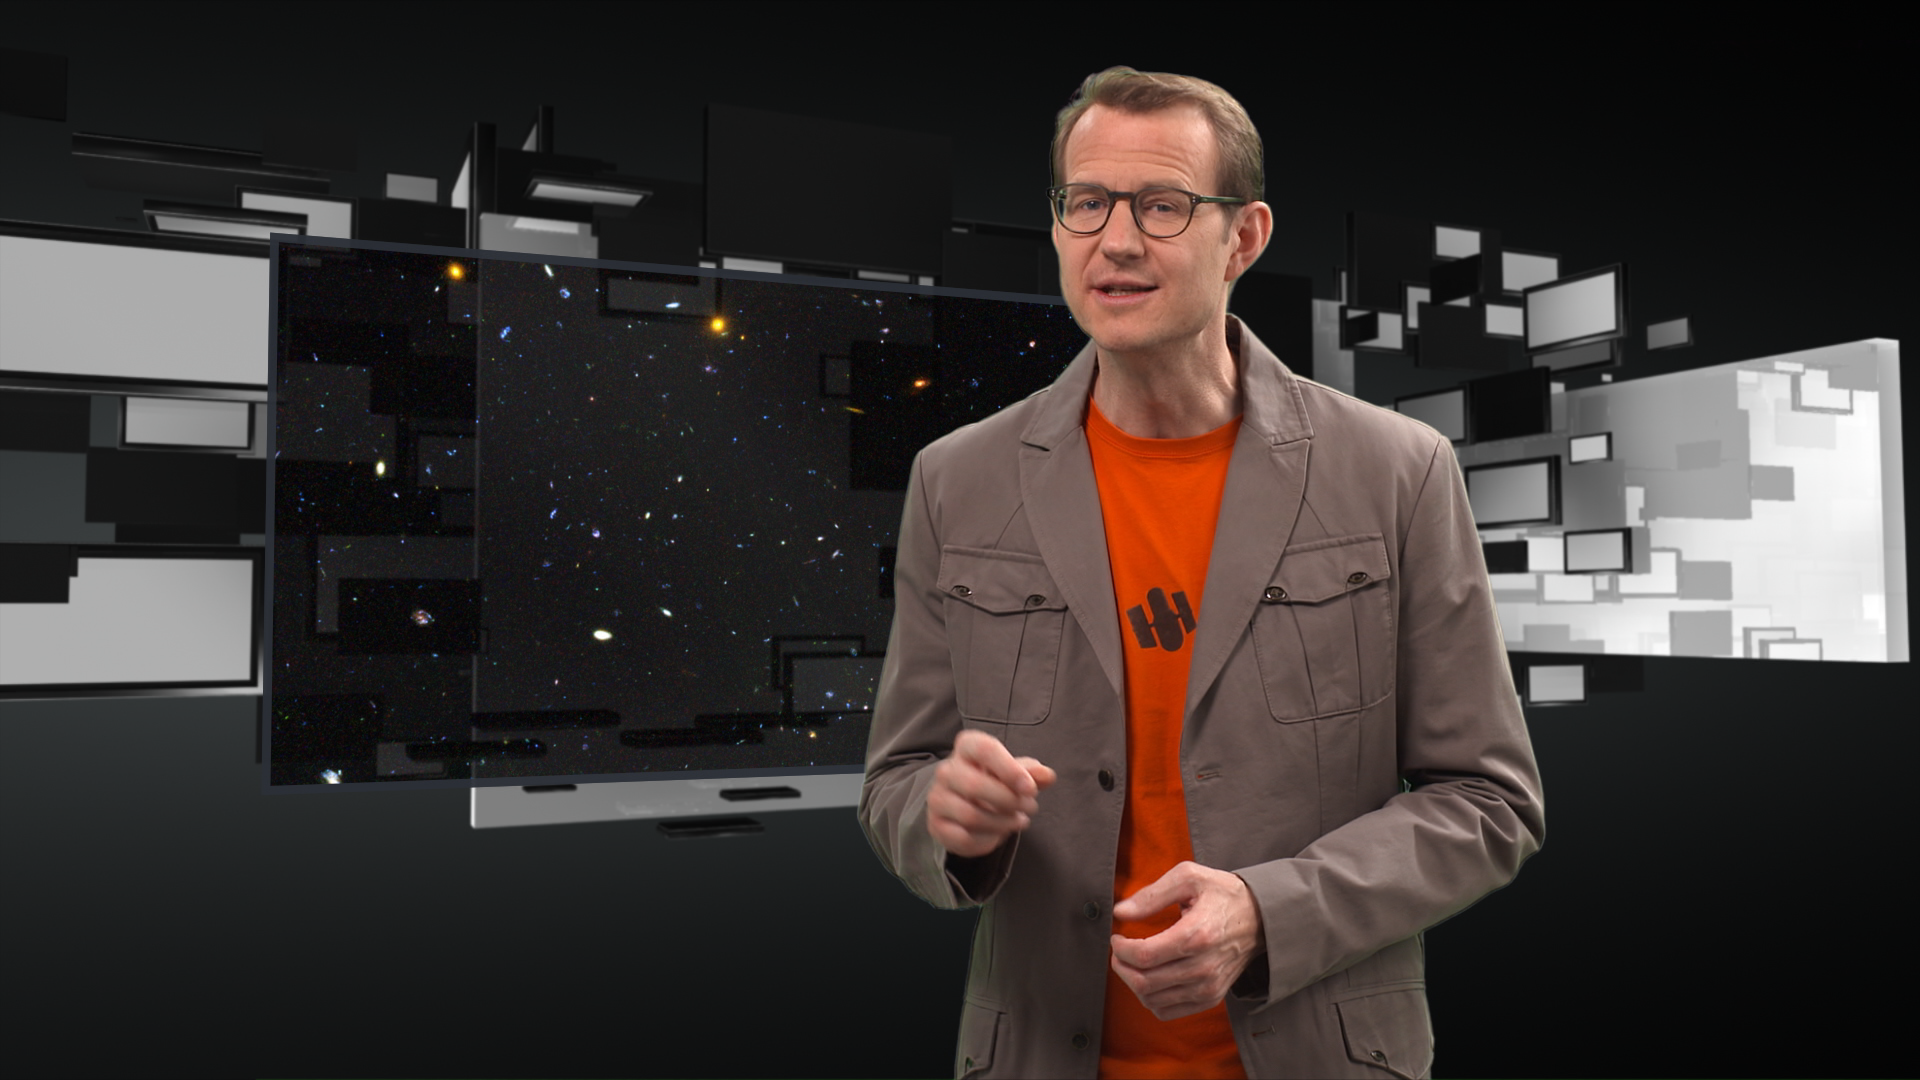

Screenshot of Hubblecast 75

Screenshot of Hubblecast 75: Dwarf Galaxies that Pack a Punch

Credit: NASA & ESA